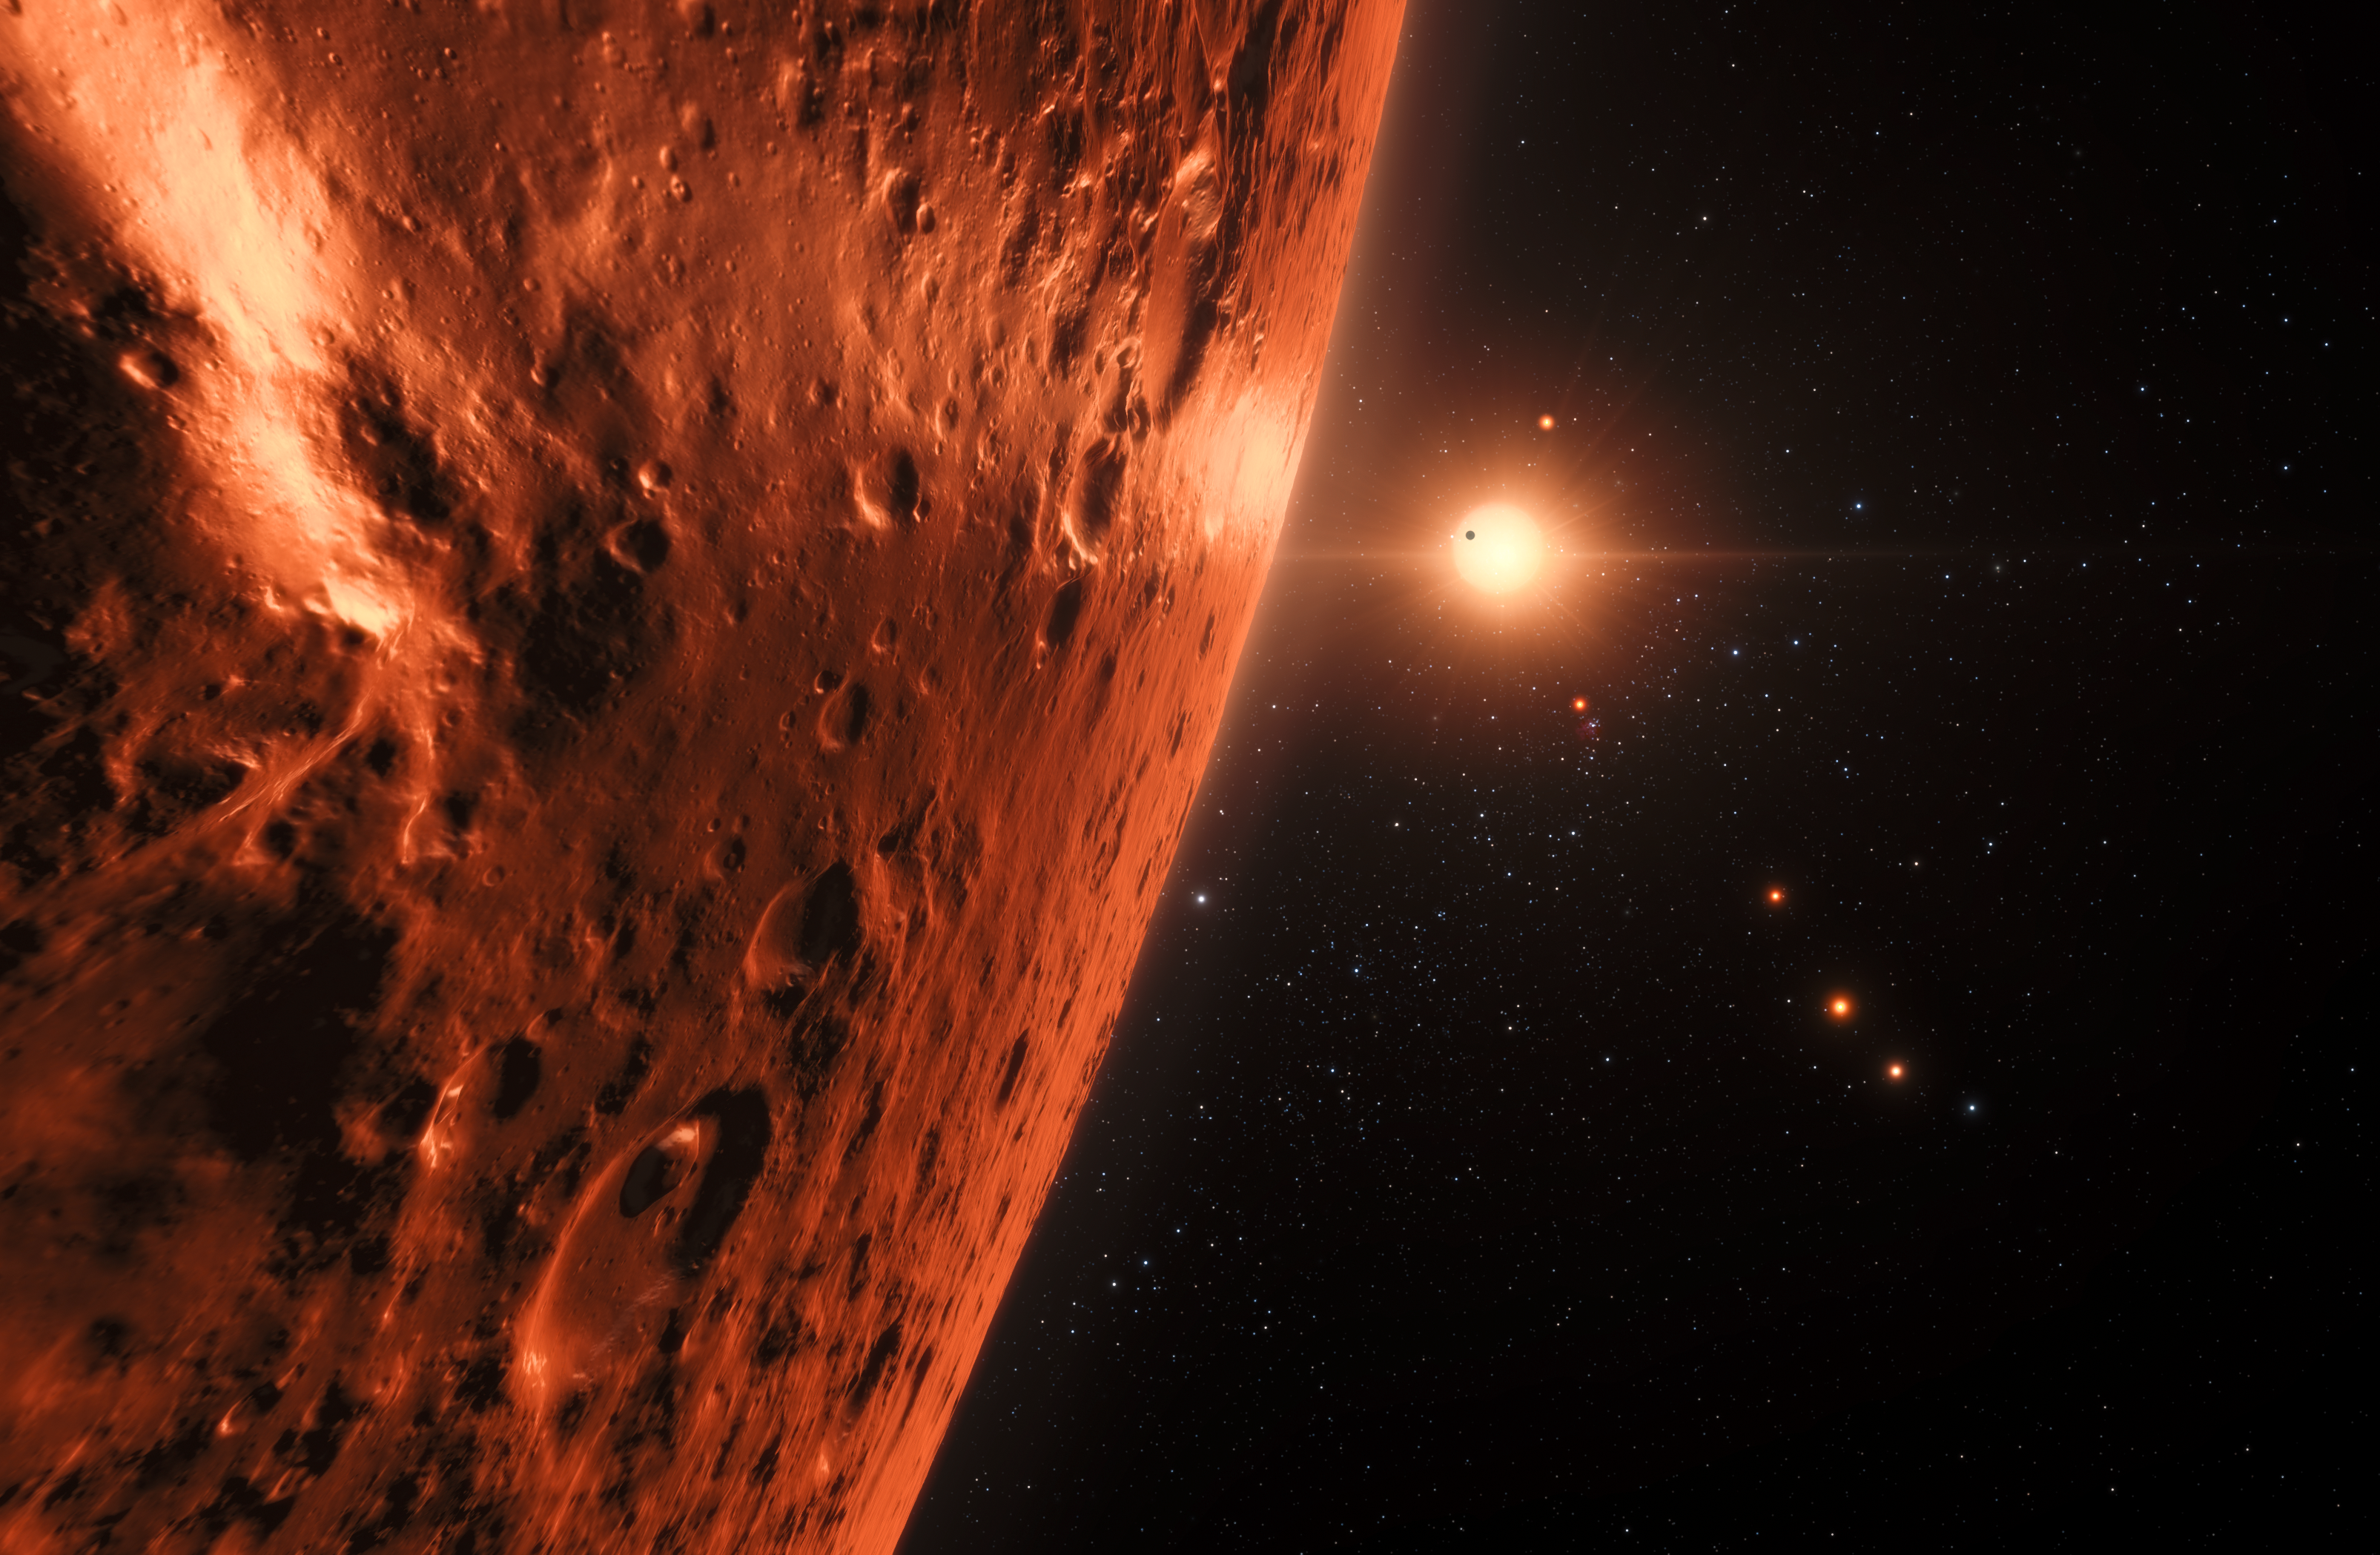

Artist’s impression of the TRAPPIST-1 planetary system

This artist’s impression shows the view from the surface of one of the planets in the TRAPPIST-1 system. At least seven planets orbit this ultracool dwarf star 40 light-years from Earth and they are all roughly the same size as the Earth. Several of the planets are at the right distances from their star for liquid water to exist on the surfaces.

This artist’s impression is based on the known physical parameters of the planets and stars seen, and uses a vast database of objects in the Universe.

Credit: ESO/N. Bartmann/spaceengine.org